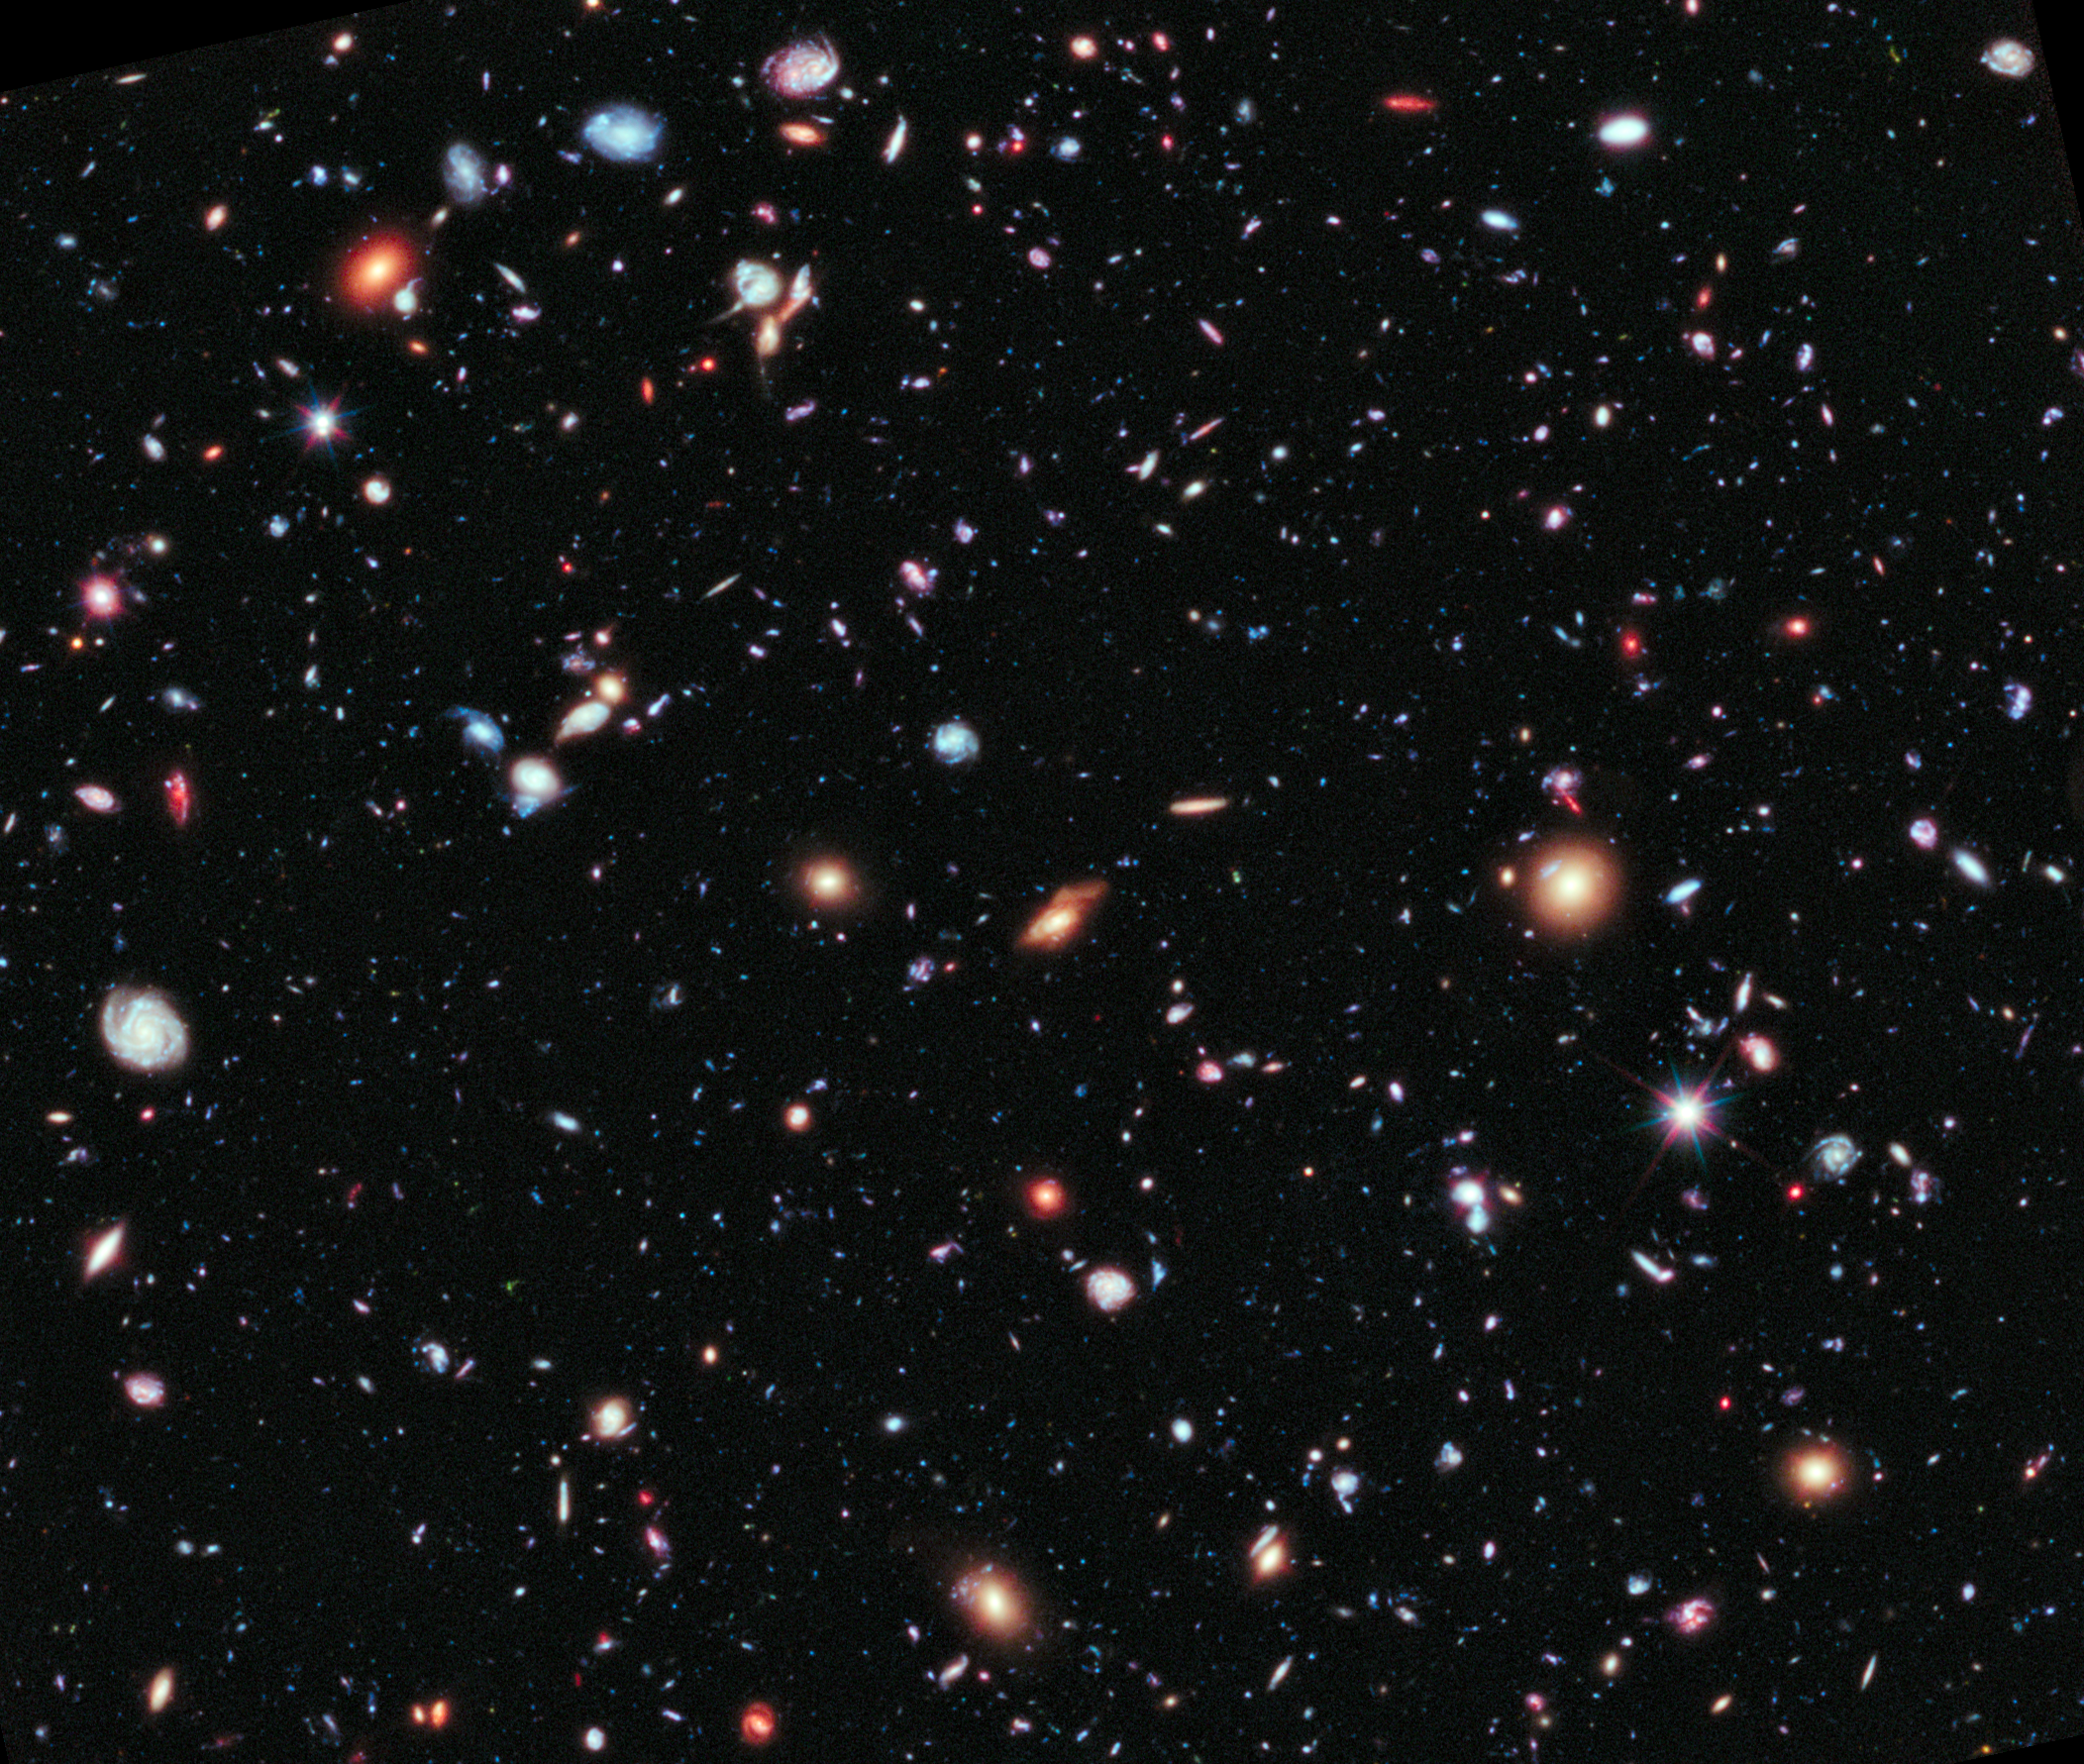

Portion of the Hubble eXtreme Deep Field

This image shows a portion of the Hubble eXtreme Deep Field, or XDF, as seen by the NASA/ESA Hubble Space Telescope. This image, originally released in 2012, was taken of a patch of sky within the original Hubble Ultra Deep Field, which was released 2004.

The original data for the Hubble Ultra Deep Field image was collected from September 2003 to January 2004.

Credit: NASA, ESA, G. Illingworth, D. Magee, and P. Oesch (University of California, Santa Cruz), R. Bouwens (Leiden University), and the HUDF09 Team